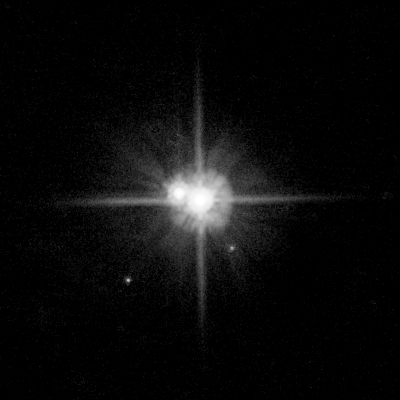

Pluto system: March 2, 2006

These Hubble Space Telescope images of Pluto's two newly discovered satellites reveal that the new moons have the same color as Charon.

Credit: NASA, ESA, H. Weaver (Johns Hopkins University/Applied Physics Lab), A. Stern (Southwest Research Institute), and the HST Pluto Companion Search Team